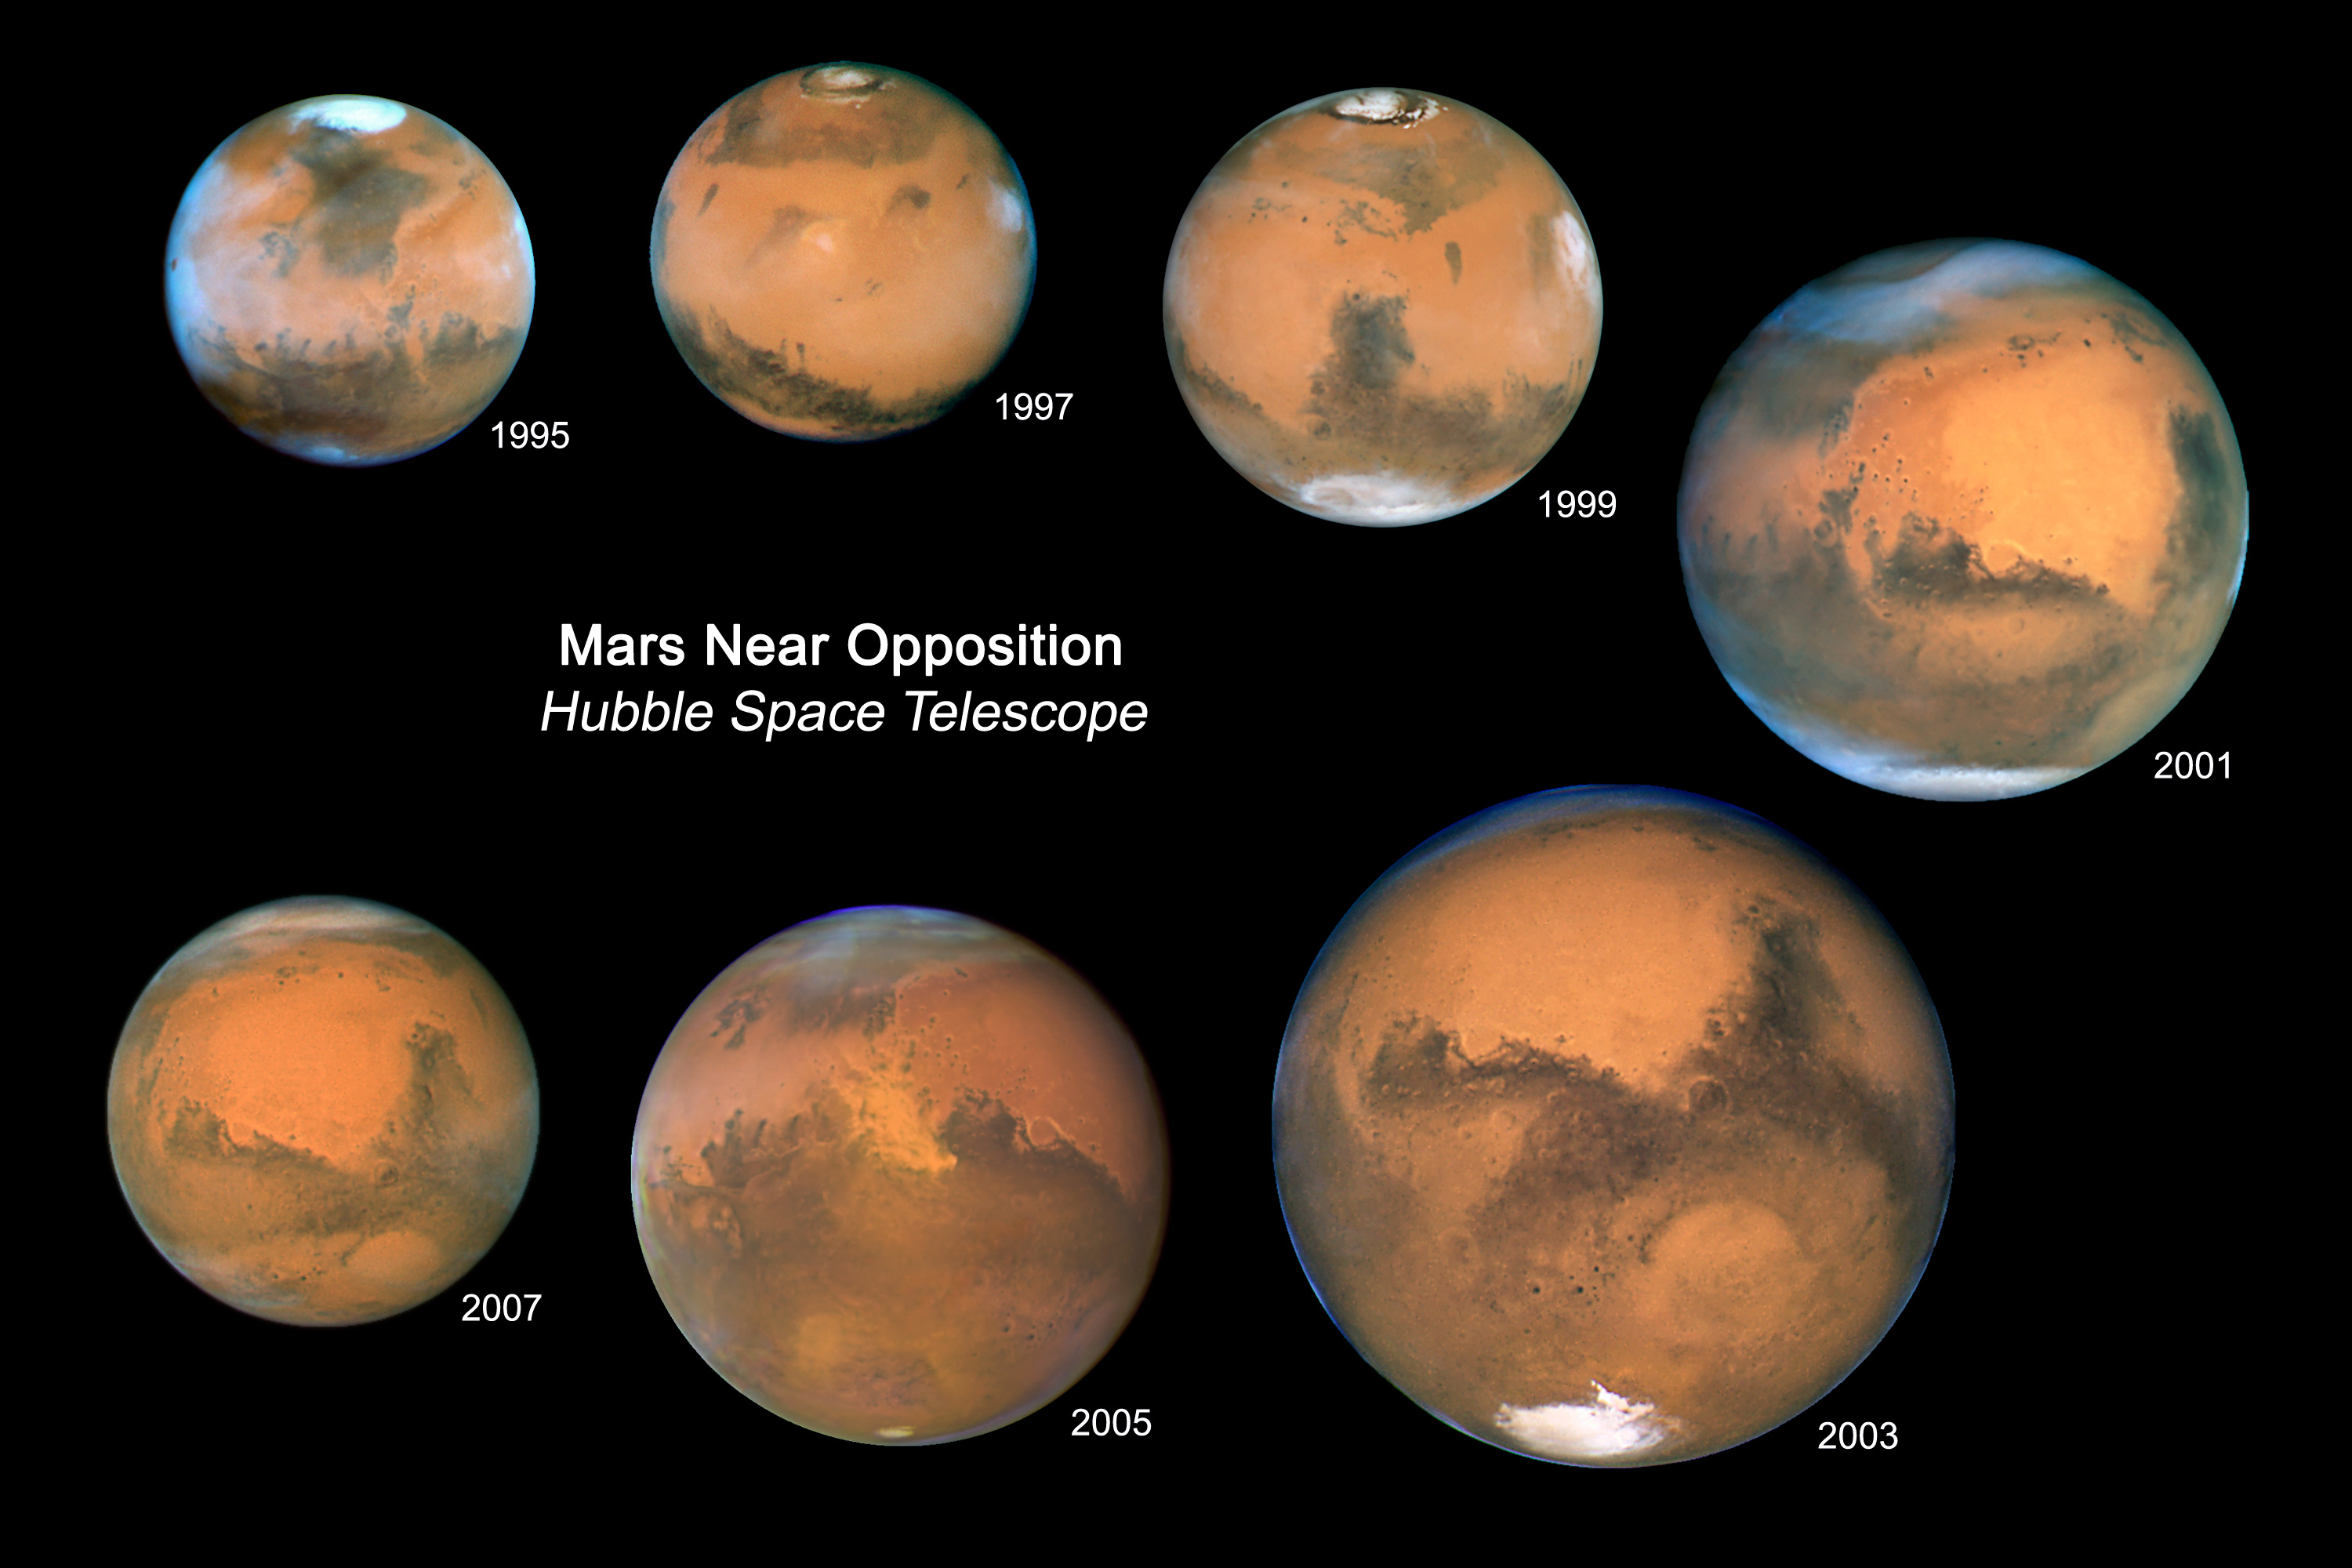

Mars Oppositions 1995-2007

Every 26 months Mars is opposite the Sun in our nighttime sky. Since 1995, Mars has been at such an "opposition" with the Sun seven times. A color composite from each of the seven Hubble opposition observations has been assembled in this mosaic to showcase the beauty and splendor that is The Red Planet.

This mosaic of all seven globes of Mars shows relative variations in the apparent angular size of Mars over the years. Mars was the closest in 2003 when it came within 56 million kilometres of Earth. The part of Mars that is tilted towards the Earth also shifts over time, resulting in the changing visibility of the polar caps. Clouds and dust storms, as well as the size of the ice caps, can change the appearance of Mars on time scales of days, weeks, and months. Other features of Mars, such as some of the large dark markings, have remained unchanged for centuries.

Credit: NASA, ESA, and Z. Levay (STScI)